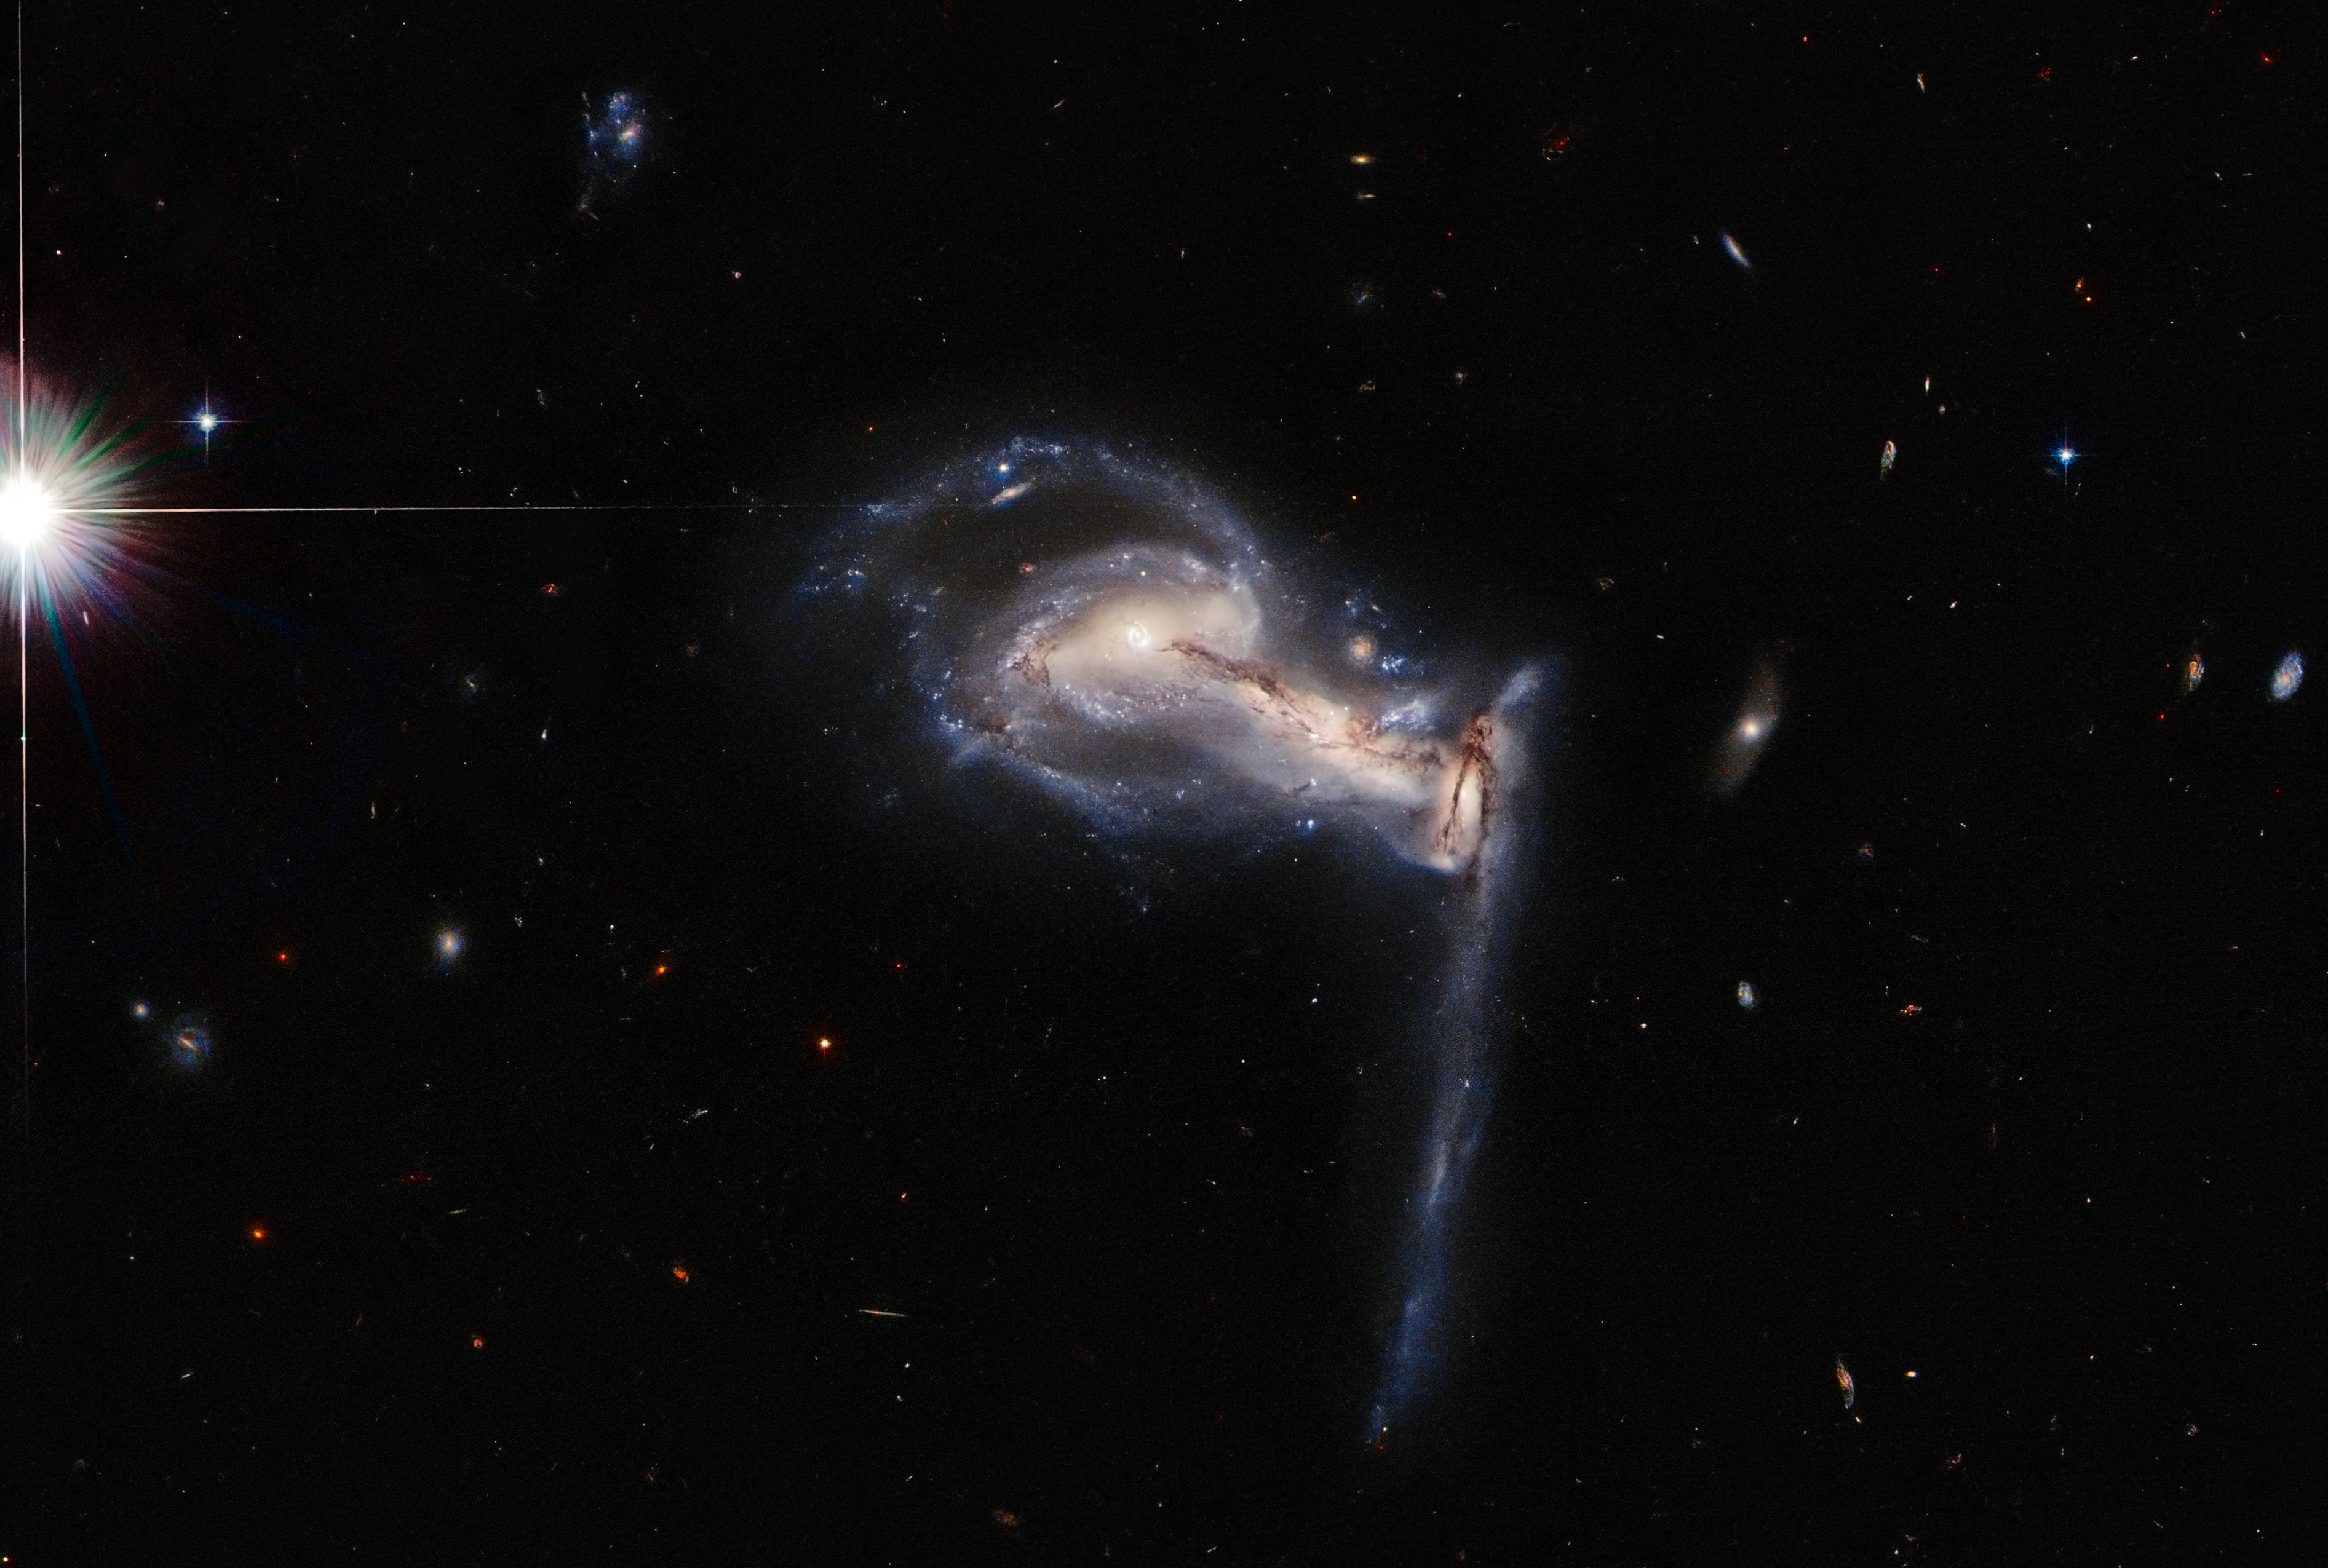

Squabbling Galactic Siblings

A dramatic triplet of galaxies takes centre stage in this latest Picture of the Week from the NASA/ESA Hubble Space Telescope, which captures a three-way gravitational tug-of-war between interacting galaxies. This system —known as Arp 195— is featured in the Atlas of Peculiar Galaxies, a list which showcases some of the weirder and more wonderful galaxies in the universe.

Observing time with the Hubble Space Telescope is extremely valuable, so astronomers don't want to waste a second. The schedule for Hubble observations is calculated using a computer algorithm which allows the spacecraft to occasionally gather bonus snapshots of data between longer observations. This image of the clashing triplet of galaxies in Arp 195 is one such snapshot. Extra observations such as these do more than provide spectacular images — they also help to identify promising targets to follow up with telescopes such as the upcoming NASA/ESA/CSA James Webb Space Telescope.

Credit: ESA/Hubble & NASA, J. Dalcanton